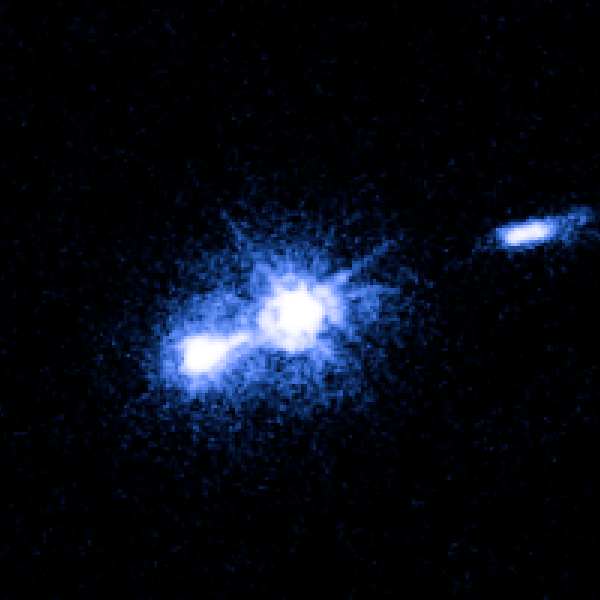

M87 nucleus and bright knot

Image taken on 9 May 2005.

Credit: NASA, ESA and J. Madrid (McMaster University, Canada)